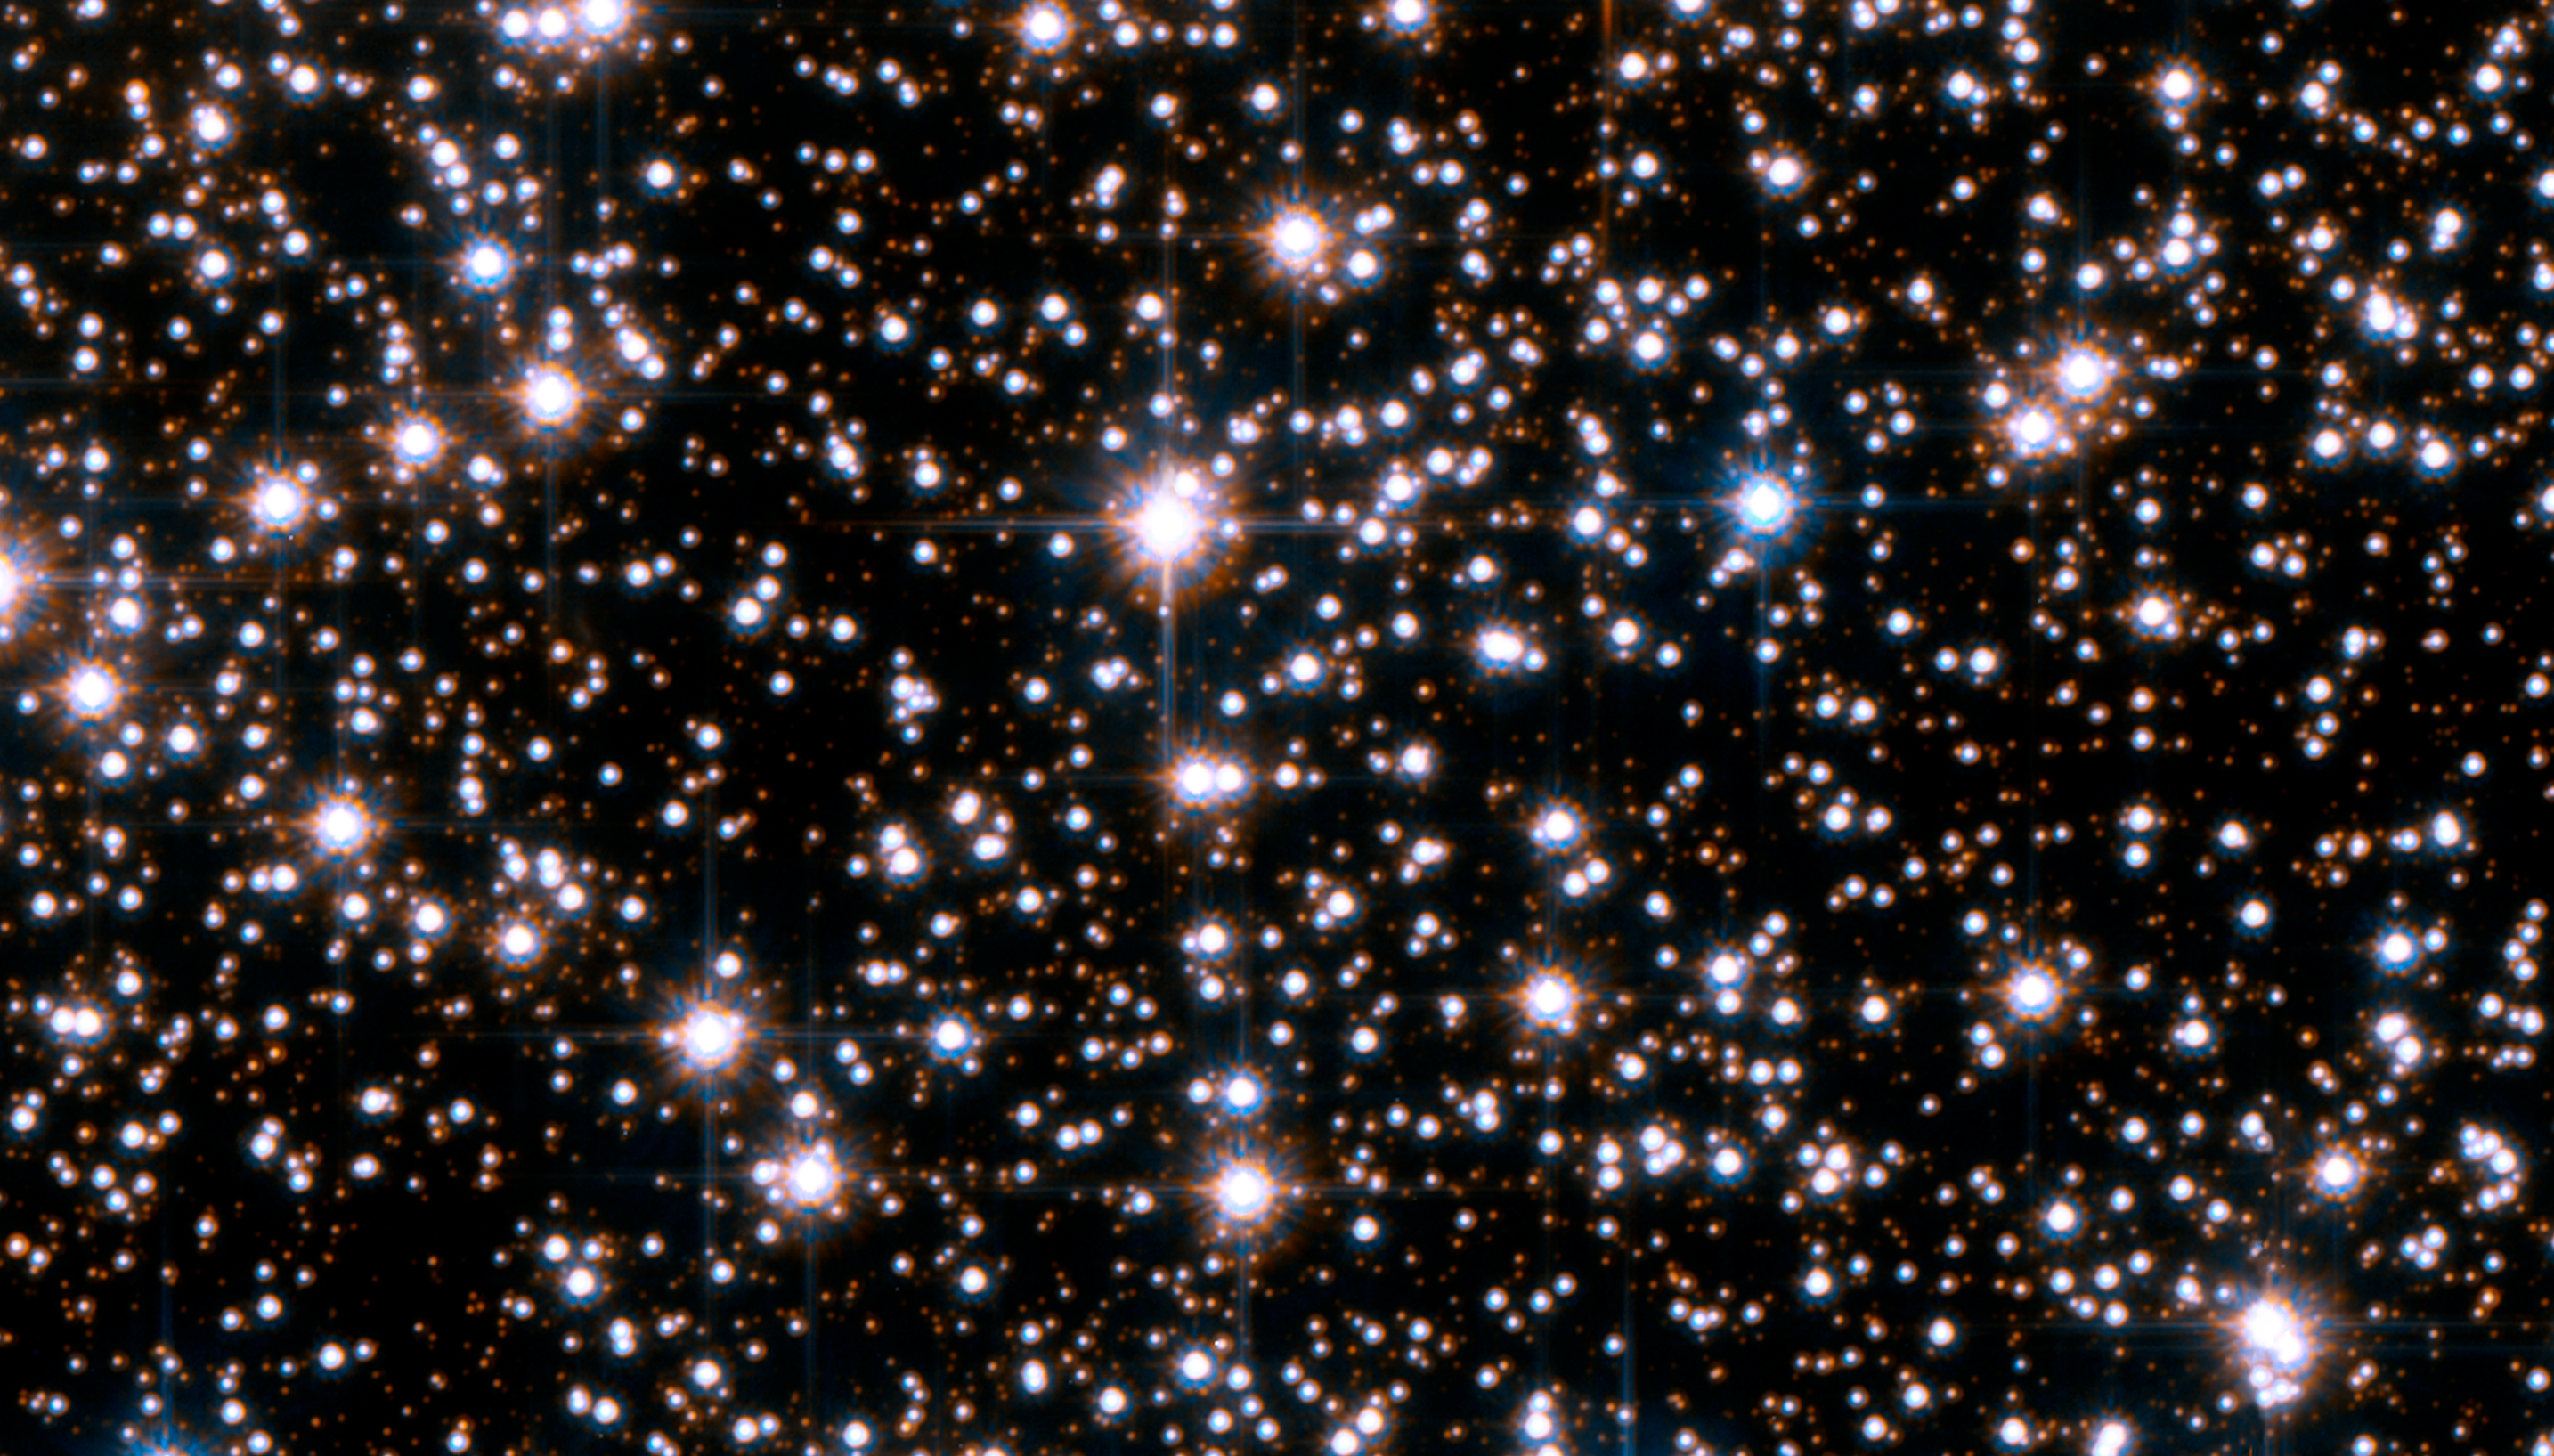

Hubble extrasolar planet search field in Sagittarius [excerpt]

This is an excerpt of the Hubble Space Telescope field of view in the Sagittarius Window Eclipsing Extrasolar Planet Search (SWEEPS).

Credit: NASA, ESA, K. Sahu (STScI) and the SWEEPS science team